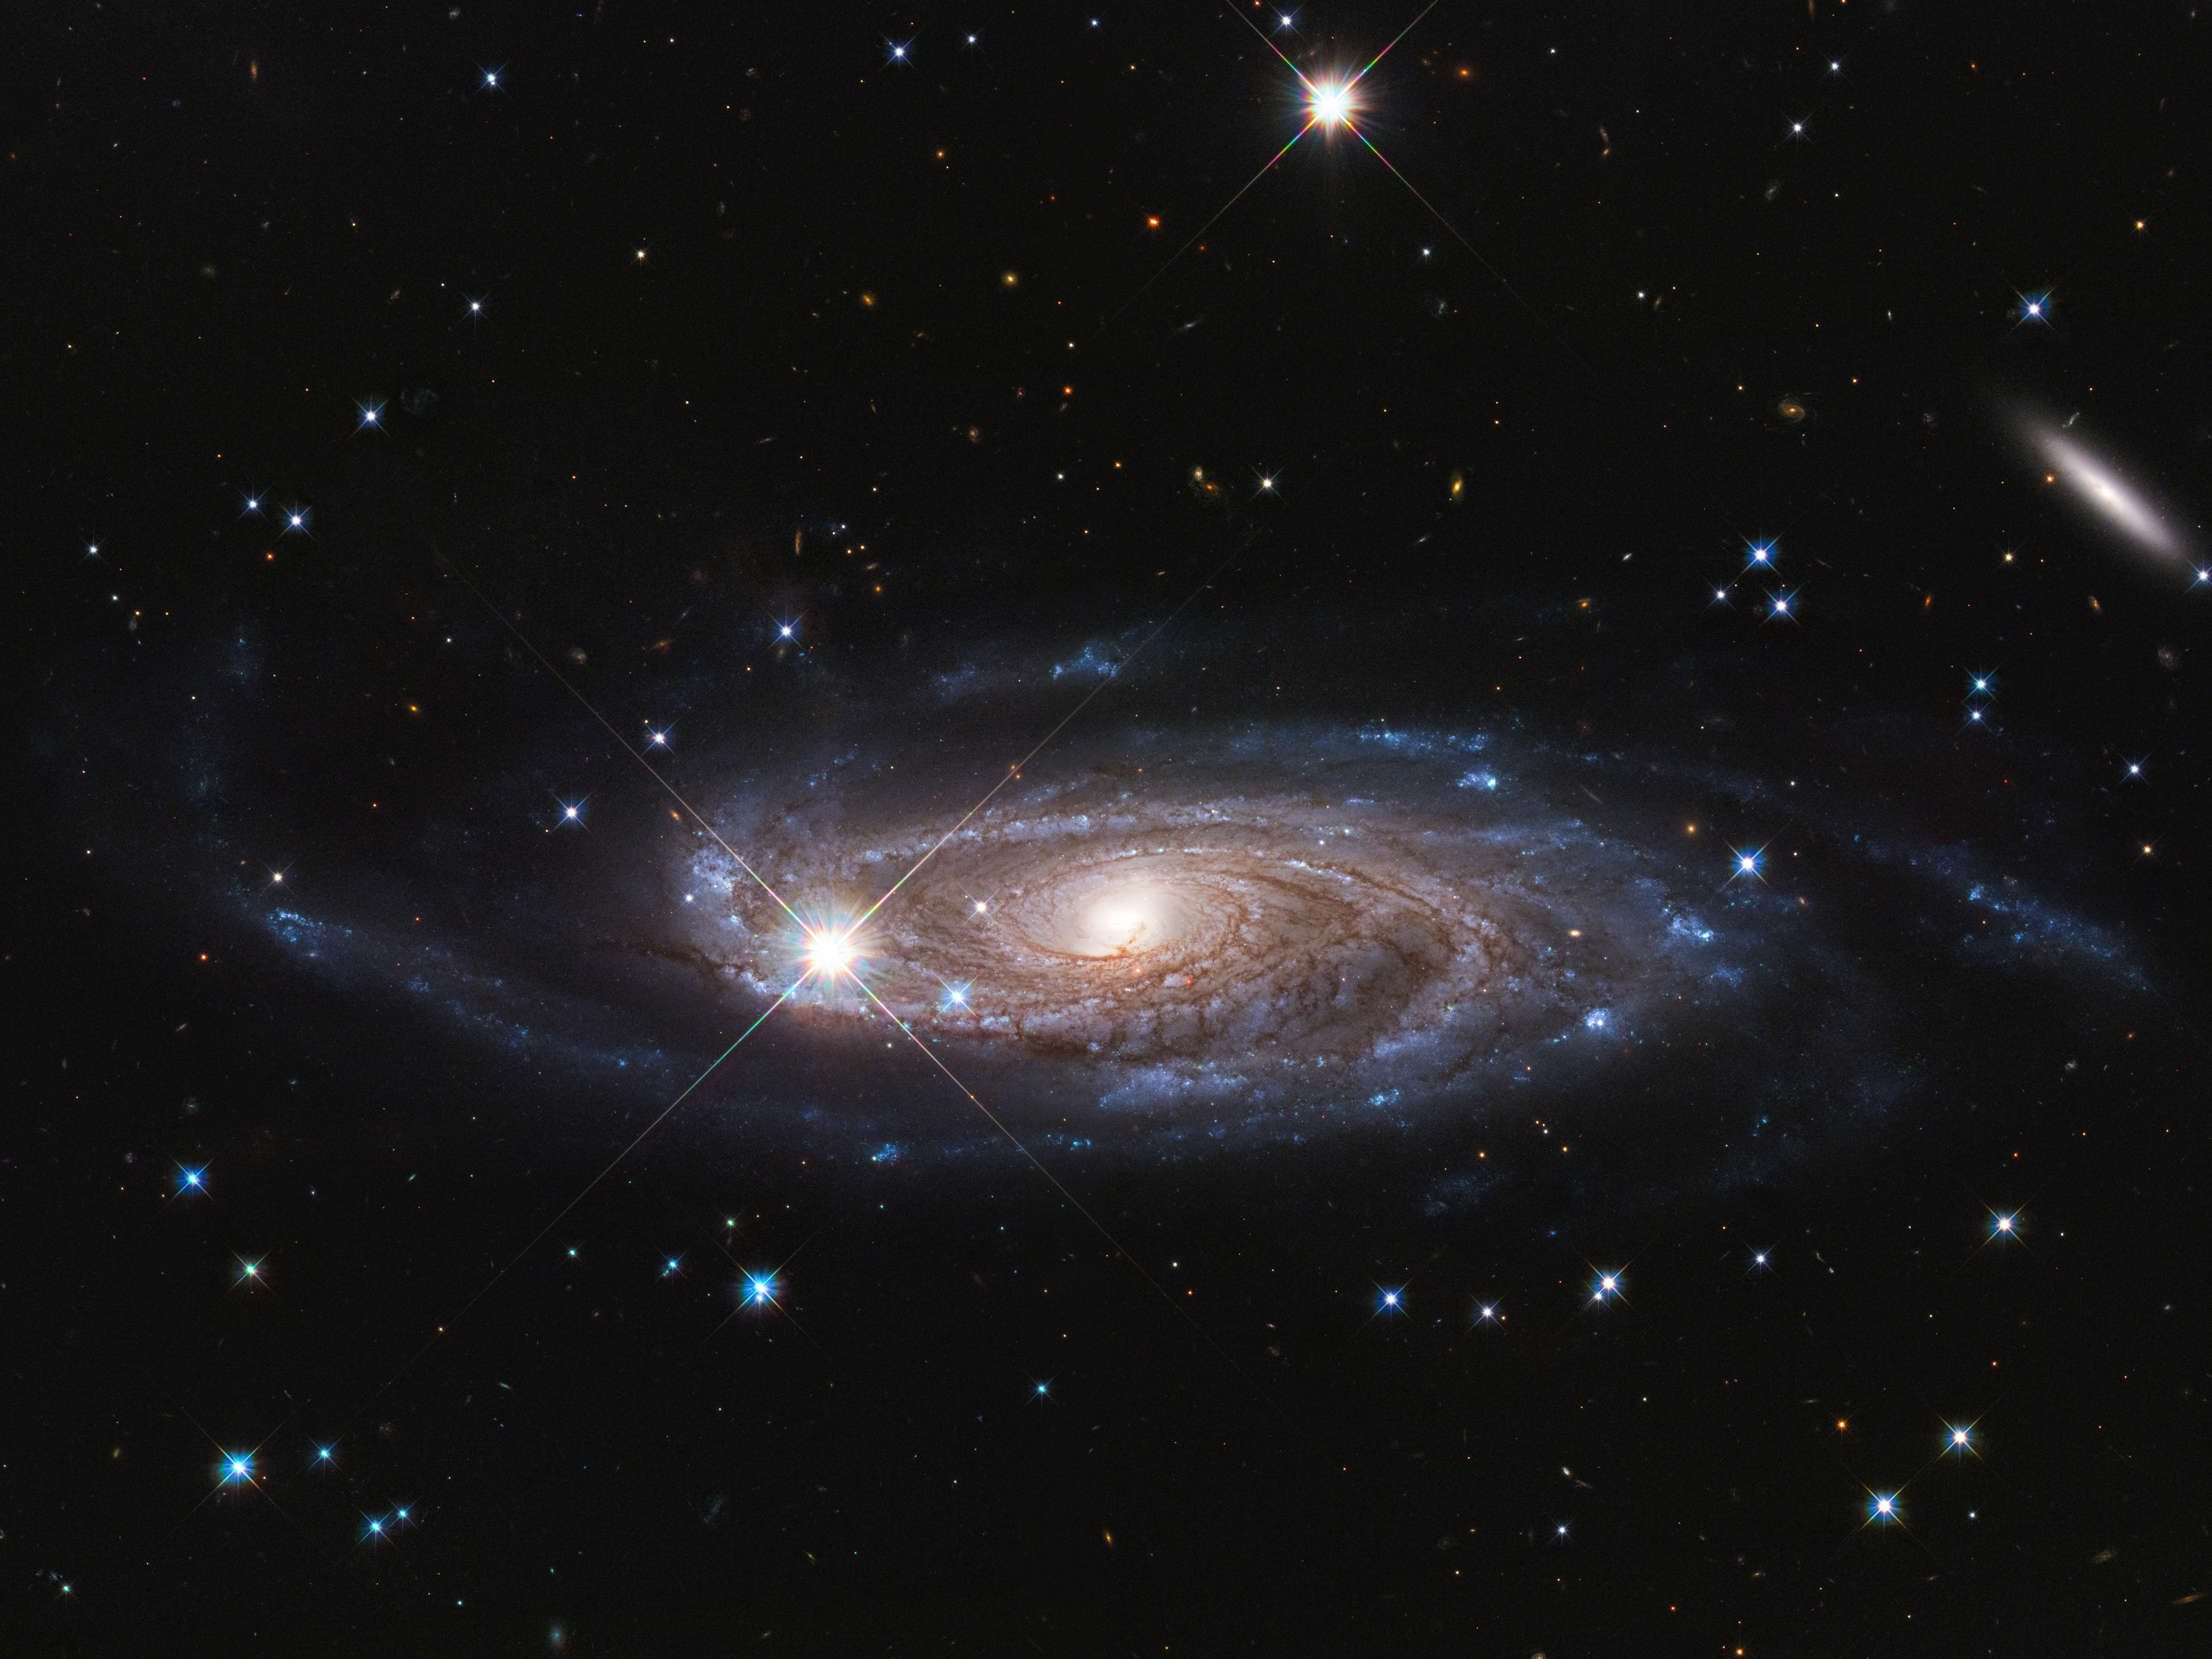

UGC 2885

Galaxy UGC 2885 may be the largest one in the local universe. It is 2.5 times wider than our Milky Way and contains 10 times as many stars. This galaxy is 232 million light-years away, located in the northern constellation of Perseus.

Credit: NASA, ESA, and B. Holwerda (University of Louisville).